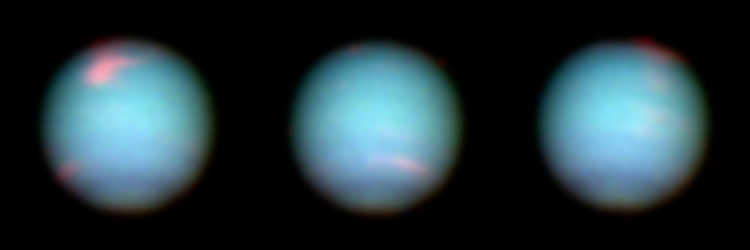

Neptune

These Hubble Space Telescope views of the blue-green planet Neptune provide three snapshots of changing weather conditions. The images were taken in 1994 on October 10 (upper left), October 18 (upper right), and November 2 (lower center), when Neptune was 2.8 billion miles (4.5 billion kilometers) from Earth.

Credit: H. Hammel (Massachusetts Institute of Technology) and NASA/ESA